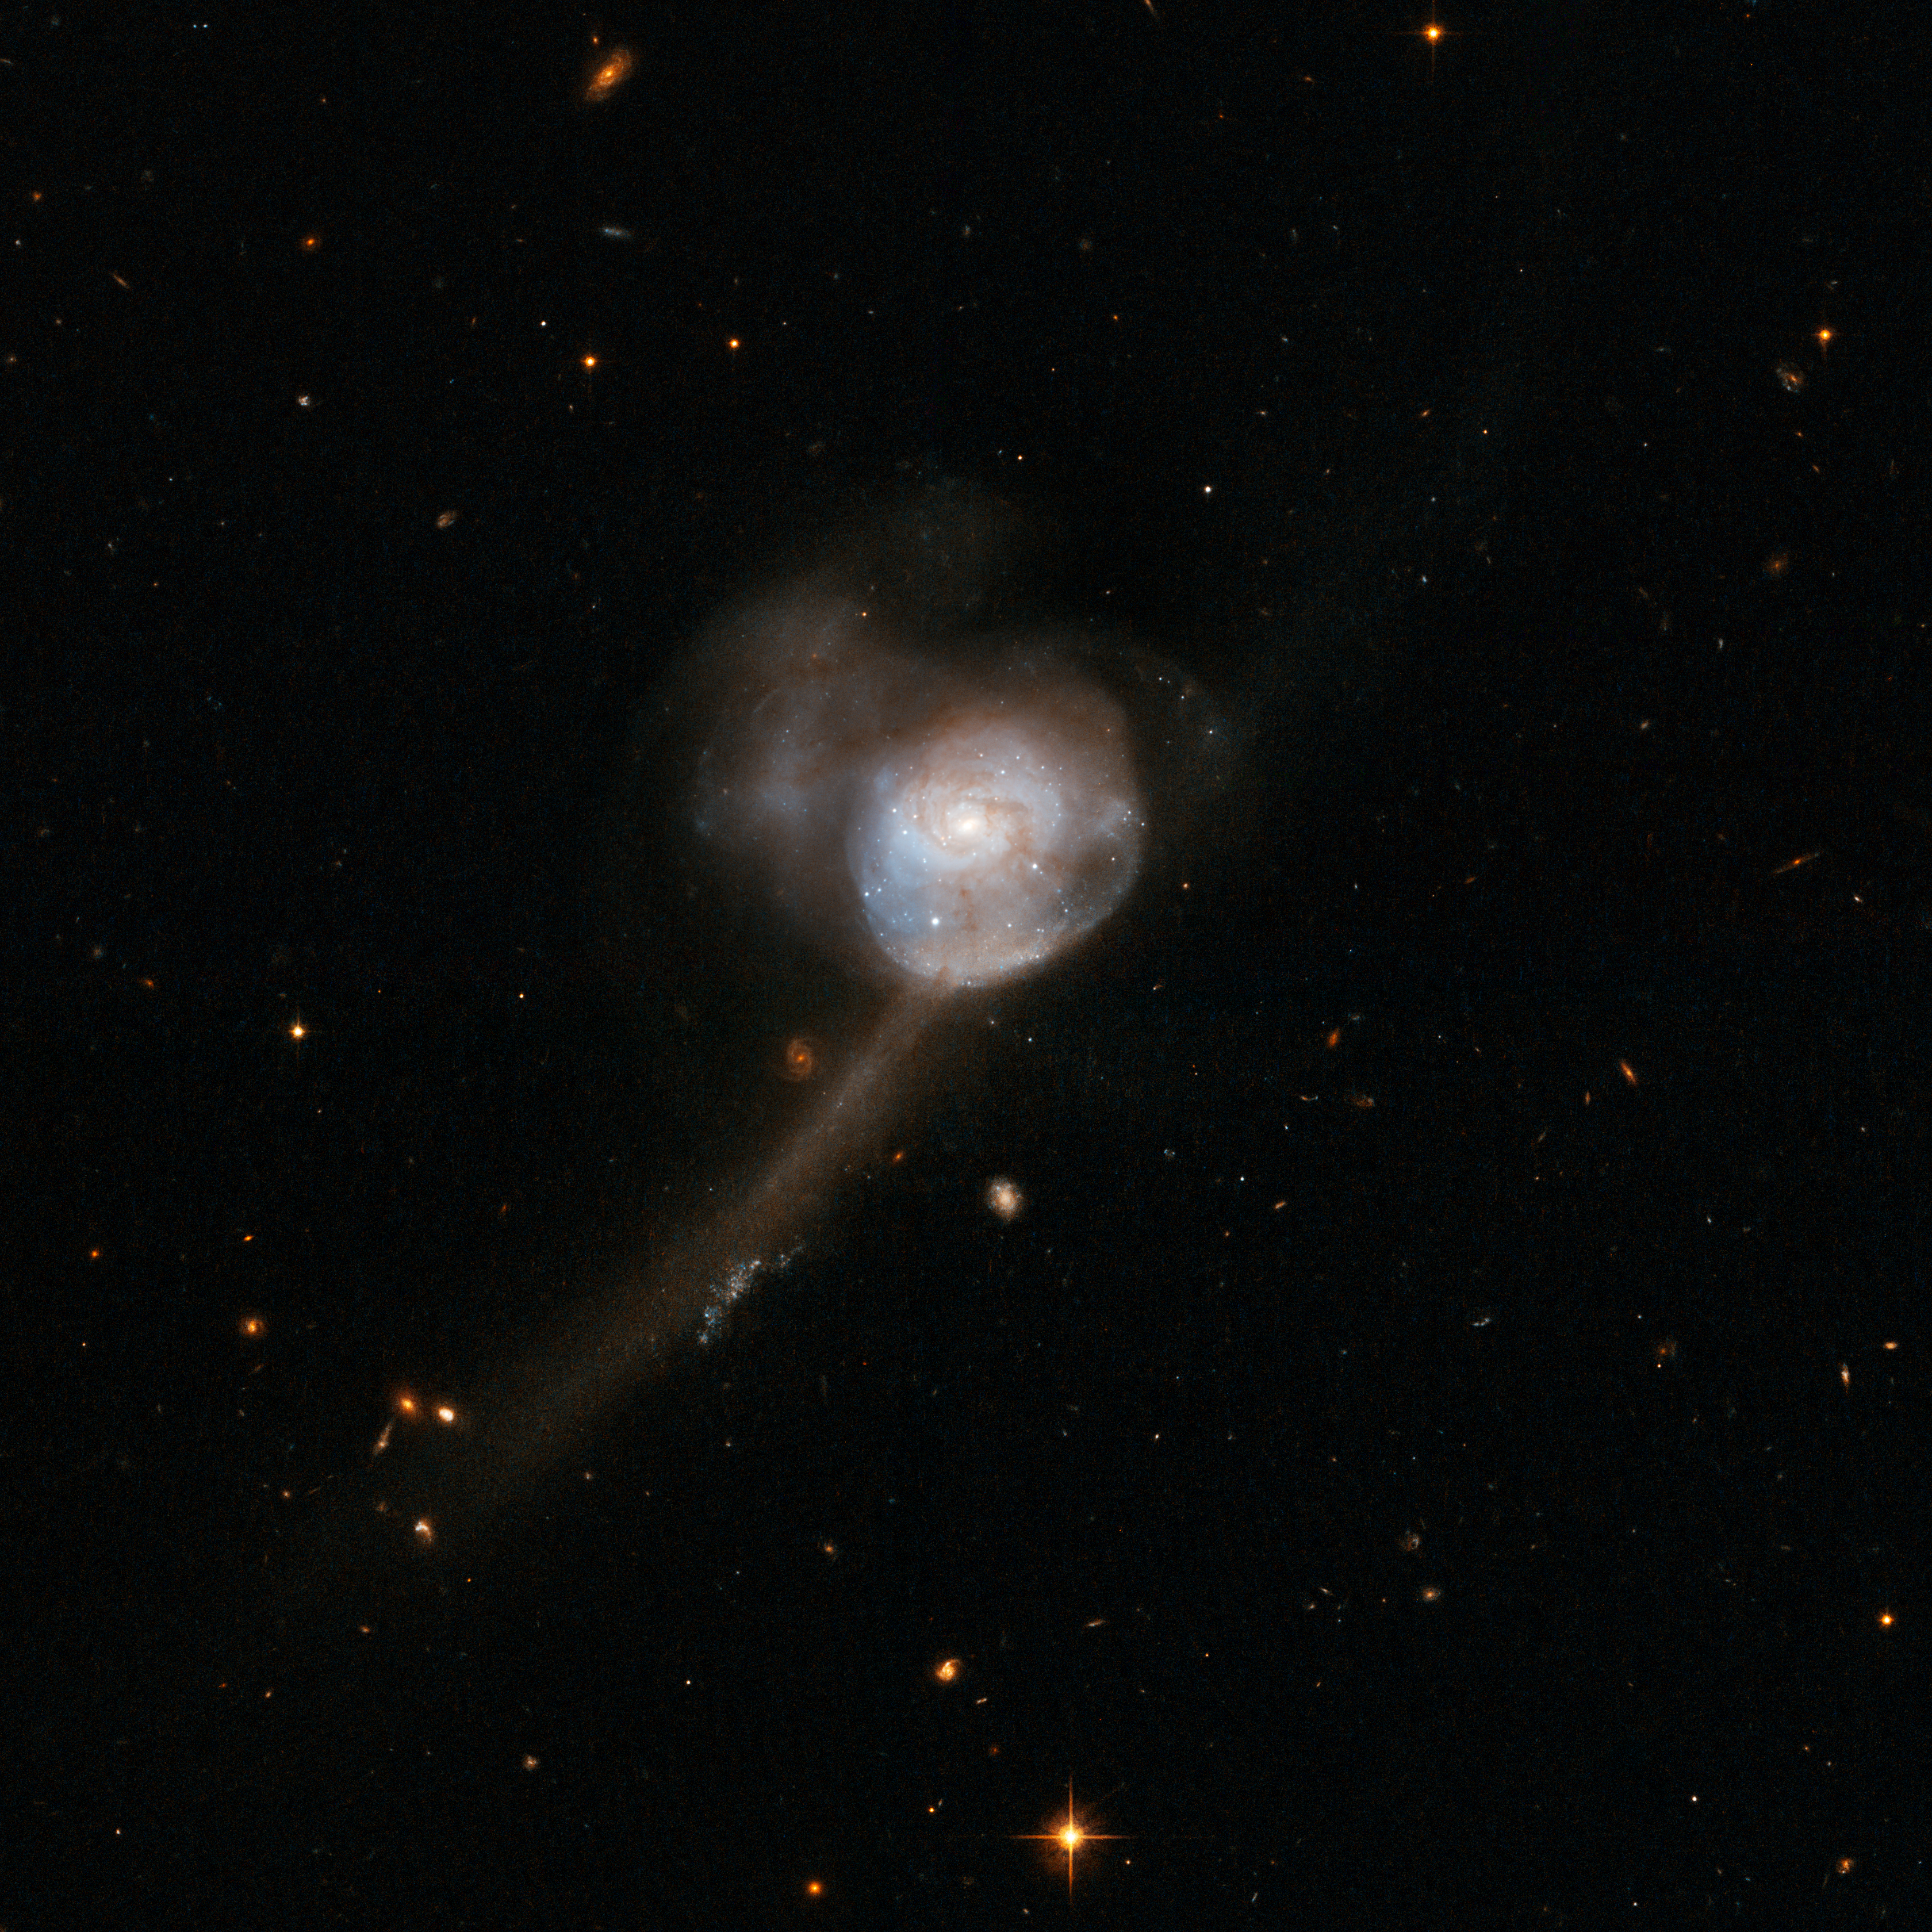

NGC 17

This galaxy features a single nucleus, a containing a blue central disc with delicate fine structure in the outer parts and tidal tails indicative of two former disc galaxies. At present these galaxies appear to have completed their merger. The remnant shows clear signs that the merger was gas-rich and accompanied by a starburst. NGC 17 is gas-rich and can sustain its strong central starburst and present mild central activity for some time to come.

NGC 17 is located about 250 million light-years away in the constellation of Cetus, the Whale.

This image is part of a large collection of 59 images of merging galaxies taken by the Hubble Space Telescope and released on the occasion of its 18th anniversary on 24th April 2008.

Credit: NASA, ESA, the Hubble Heritage Team (STScI/AURA)-ESA/Hubble Collaboration and A. Evans (University of Virginia, Charlottesville/NRAO/Stony Brook University)